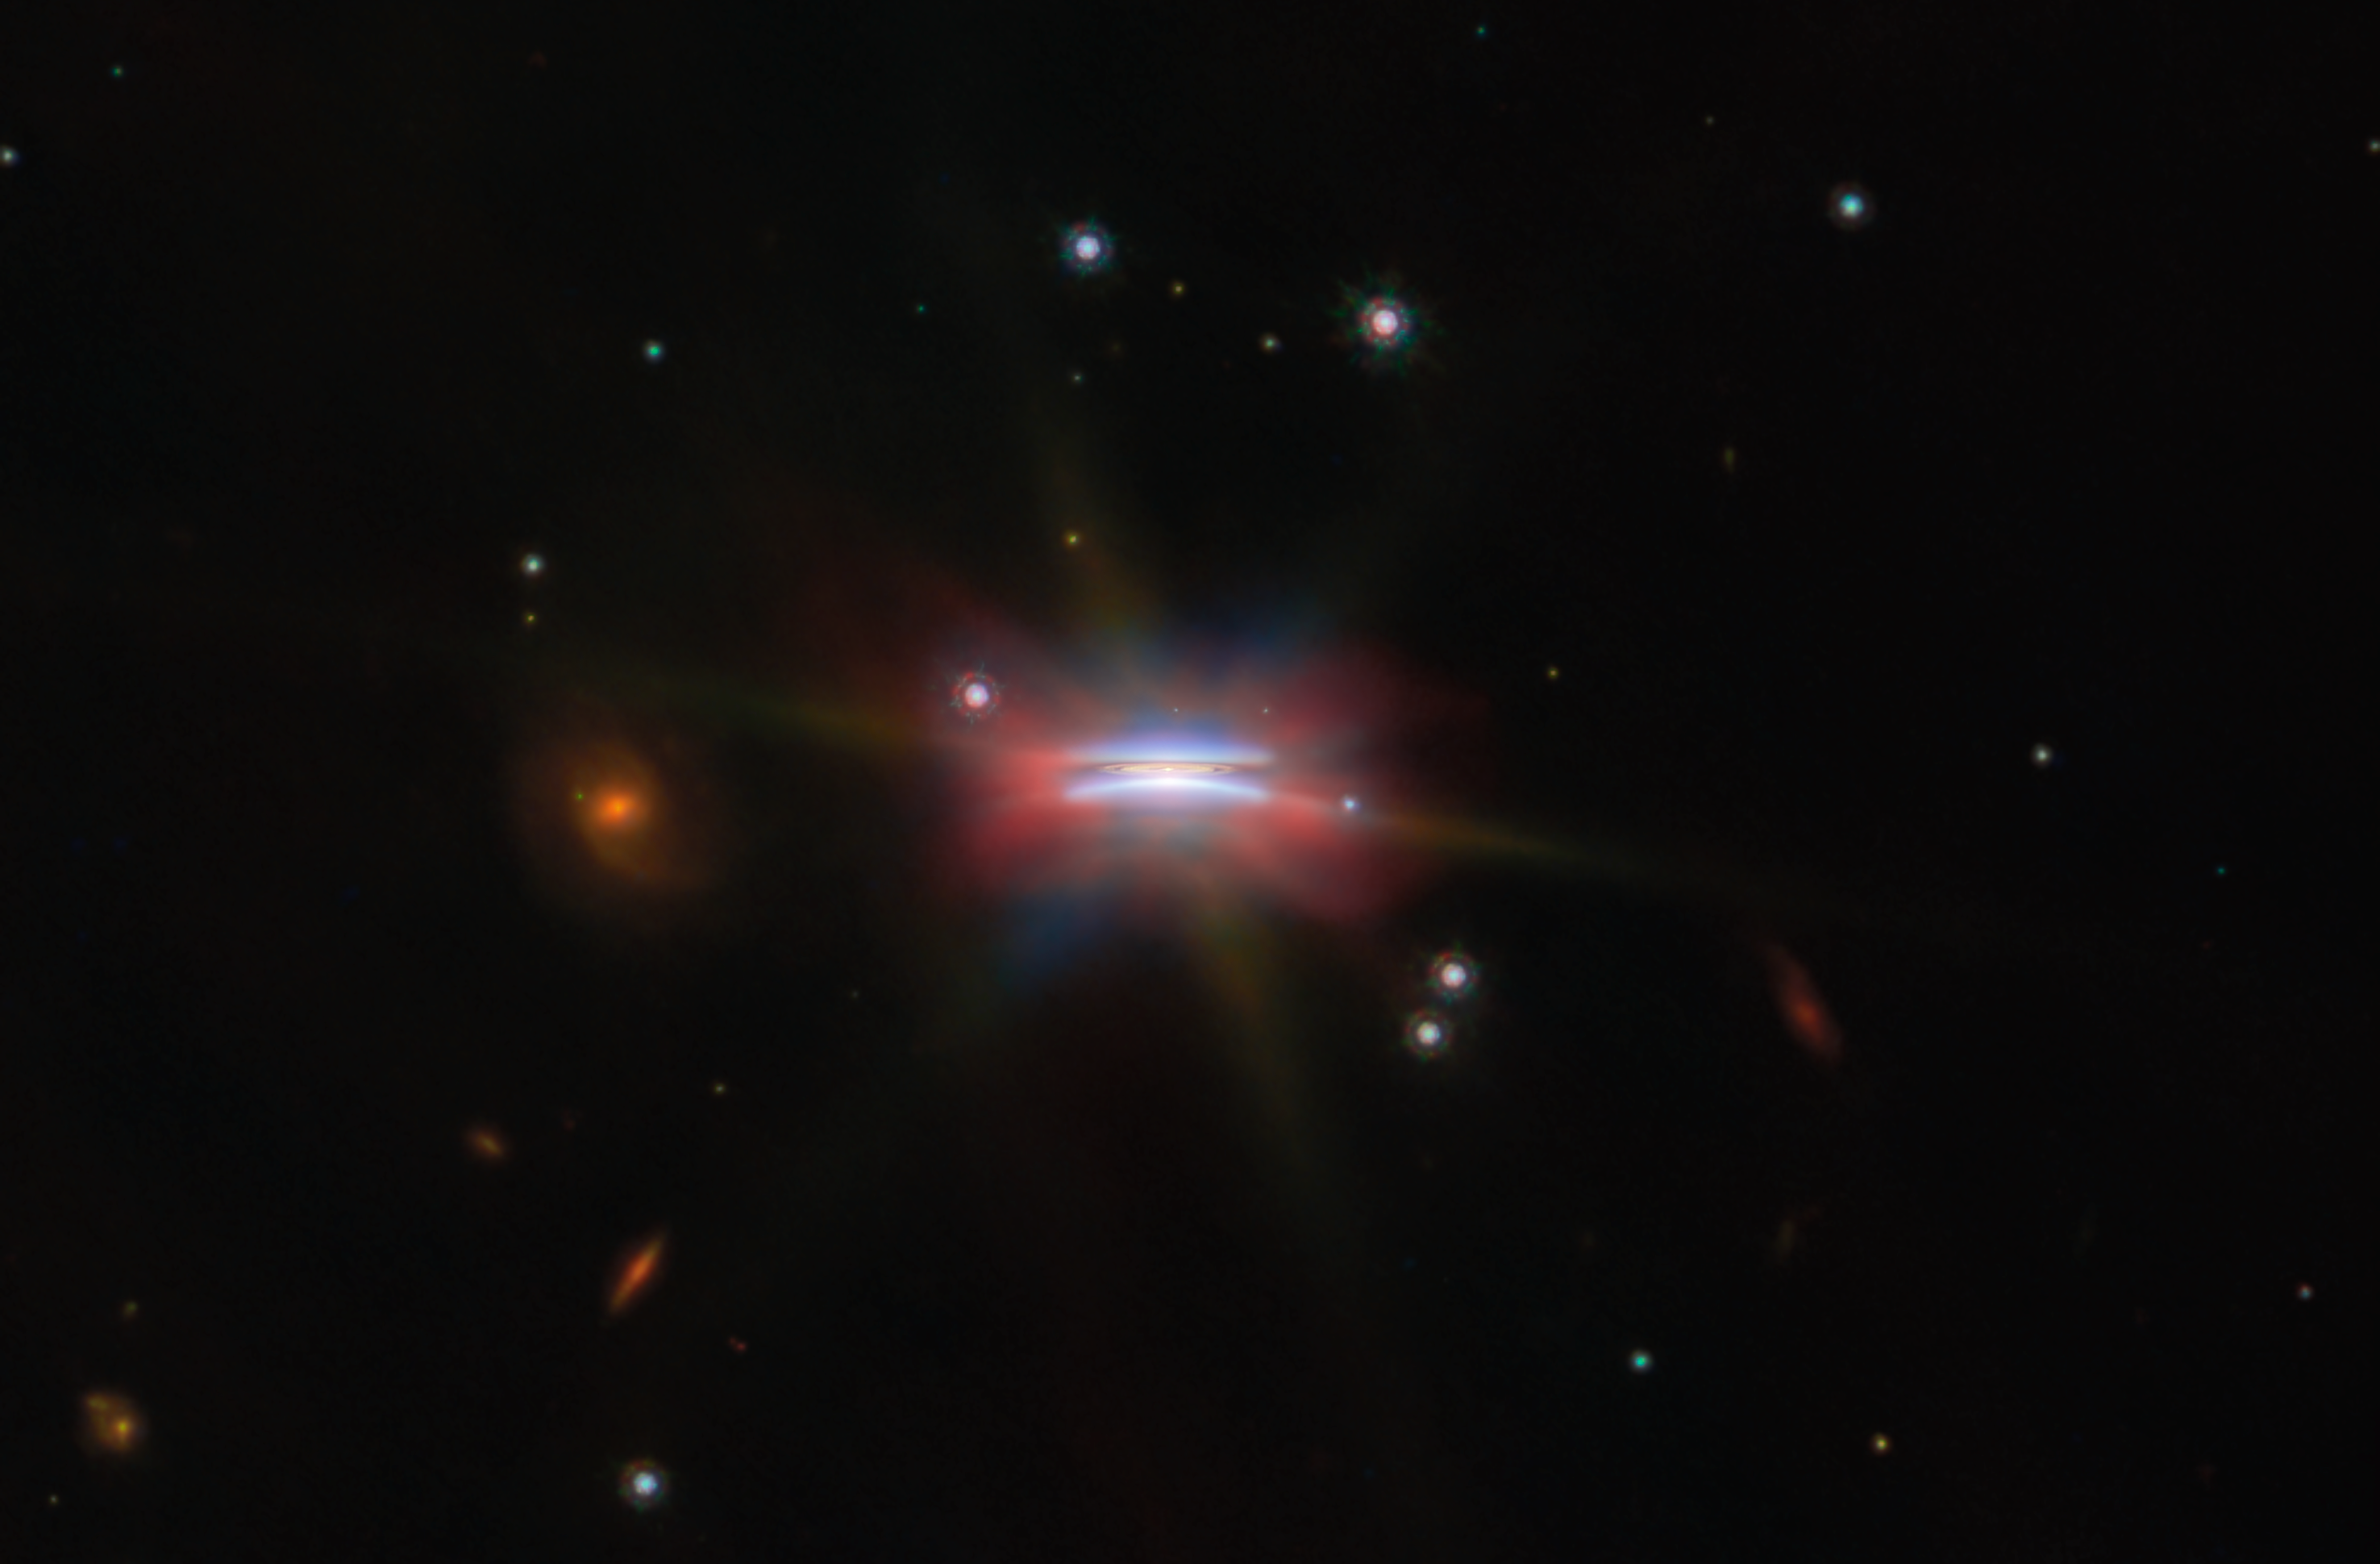

Oph 163131 (wide view)

This shining disc in the middle of a dark, empty background is a protoplanetary disc named Oph 163131, and it’s one of two featured for this month's ESA/Webb Picture of the Month. Also catalogued as 2MASS J16313124-2426281, it is located about 480 light-years away in our galaxy, in the constellation Ophiuchus. Its close location, almost edge-on inclination of 85 degrees (where 90 would be perfectly edge-on) and its considerable size of 66 billion kilometres across — several times wider than our Solar System — make it an excellent target for studying these kinds of planet-forming discs.

At the centre of Oph 163131 is a newly formed star that’s still wrapped in a thick disc of gas and dust. Eventually the new star will disperse all the dust with its ferocious radiation, but before that happens there’s a chance for the dust to clump together and grow into pebbles, planetesimals and eventually planets — hence, a protoplanetary disc. Whether planets appear, and what kind of planets they are, depends on how larger and smaller dust grains migrate in the disc. An edge-on view like this shows us if dust grains are settling into a layer of large dust grains at the core of the disc. Such a layer is critical for dust grains to further grow and begin forming planets, and the thicker it is, the better.

This image of Oph 163131 combines near- and mid-infrared data from Webb’s NIRCam and MIRI instruments with visible light captured by the NASA/ESA Hubble Space Telescope and radio waves from the Atacama Large Millimeter/submillimeter Array (ALMA). Where Hubble and Webb each image tiny dust grains only micrometres across, ALMA sees larger dust grains that are about a milimetre in size, which are concentrated in the central plane of the disc. Combined with the very slightly off-edge perspective, this creates a particularly clear picture of the structure of Oph 163131.

Small dust grains floating above and below the disc scatter light from the star and reflect it at us, creating the purple arcs above and below the centre; these are most clearly seen by Hubble and Webb’s NIRCam. The disc of dust itself, here shown in yellow, is made of the larger dust grains visible to ALMA. It distinctly shows two rings separated by a gap — potentially a region where a planet is already forming and clearing up dust in the disc. The red, green and blue glow around the disc that extends far into the background appears most brightly in the mid-infrared images from MIRI, combined with the distinctive diffraction spikes from Webb at the longer wavelength observations.

Taken together, the observations describe a disc where the large dust grains that create an environment where planets can form have been concentrated into the centre, and might even have created a clump of gas that is well on its way to becoming a new planet. We get a unique view of this very interesting protoplanetary disc out of the bargain, too!

Credit: ESA/Webb, NASA & CSA, ESA/Hubble, ALMA (ESO/NAOJ/NRAO), M. Villenave